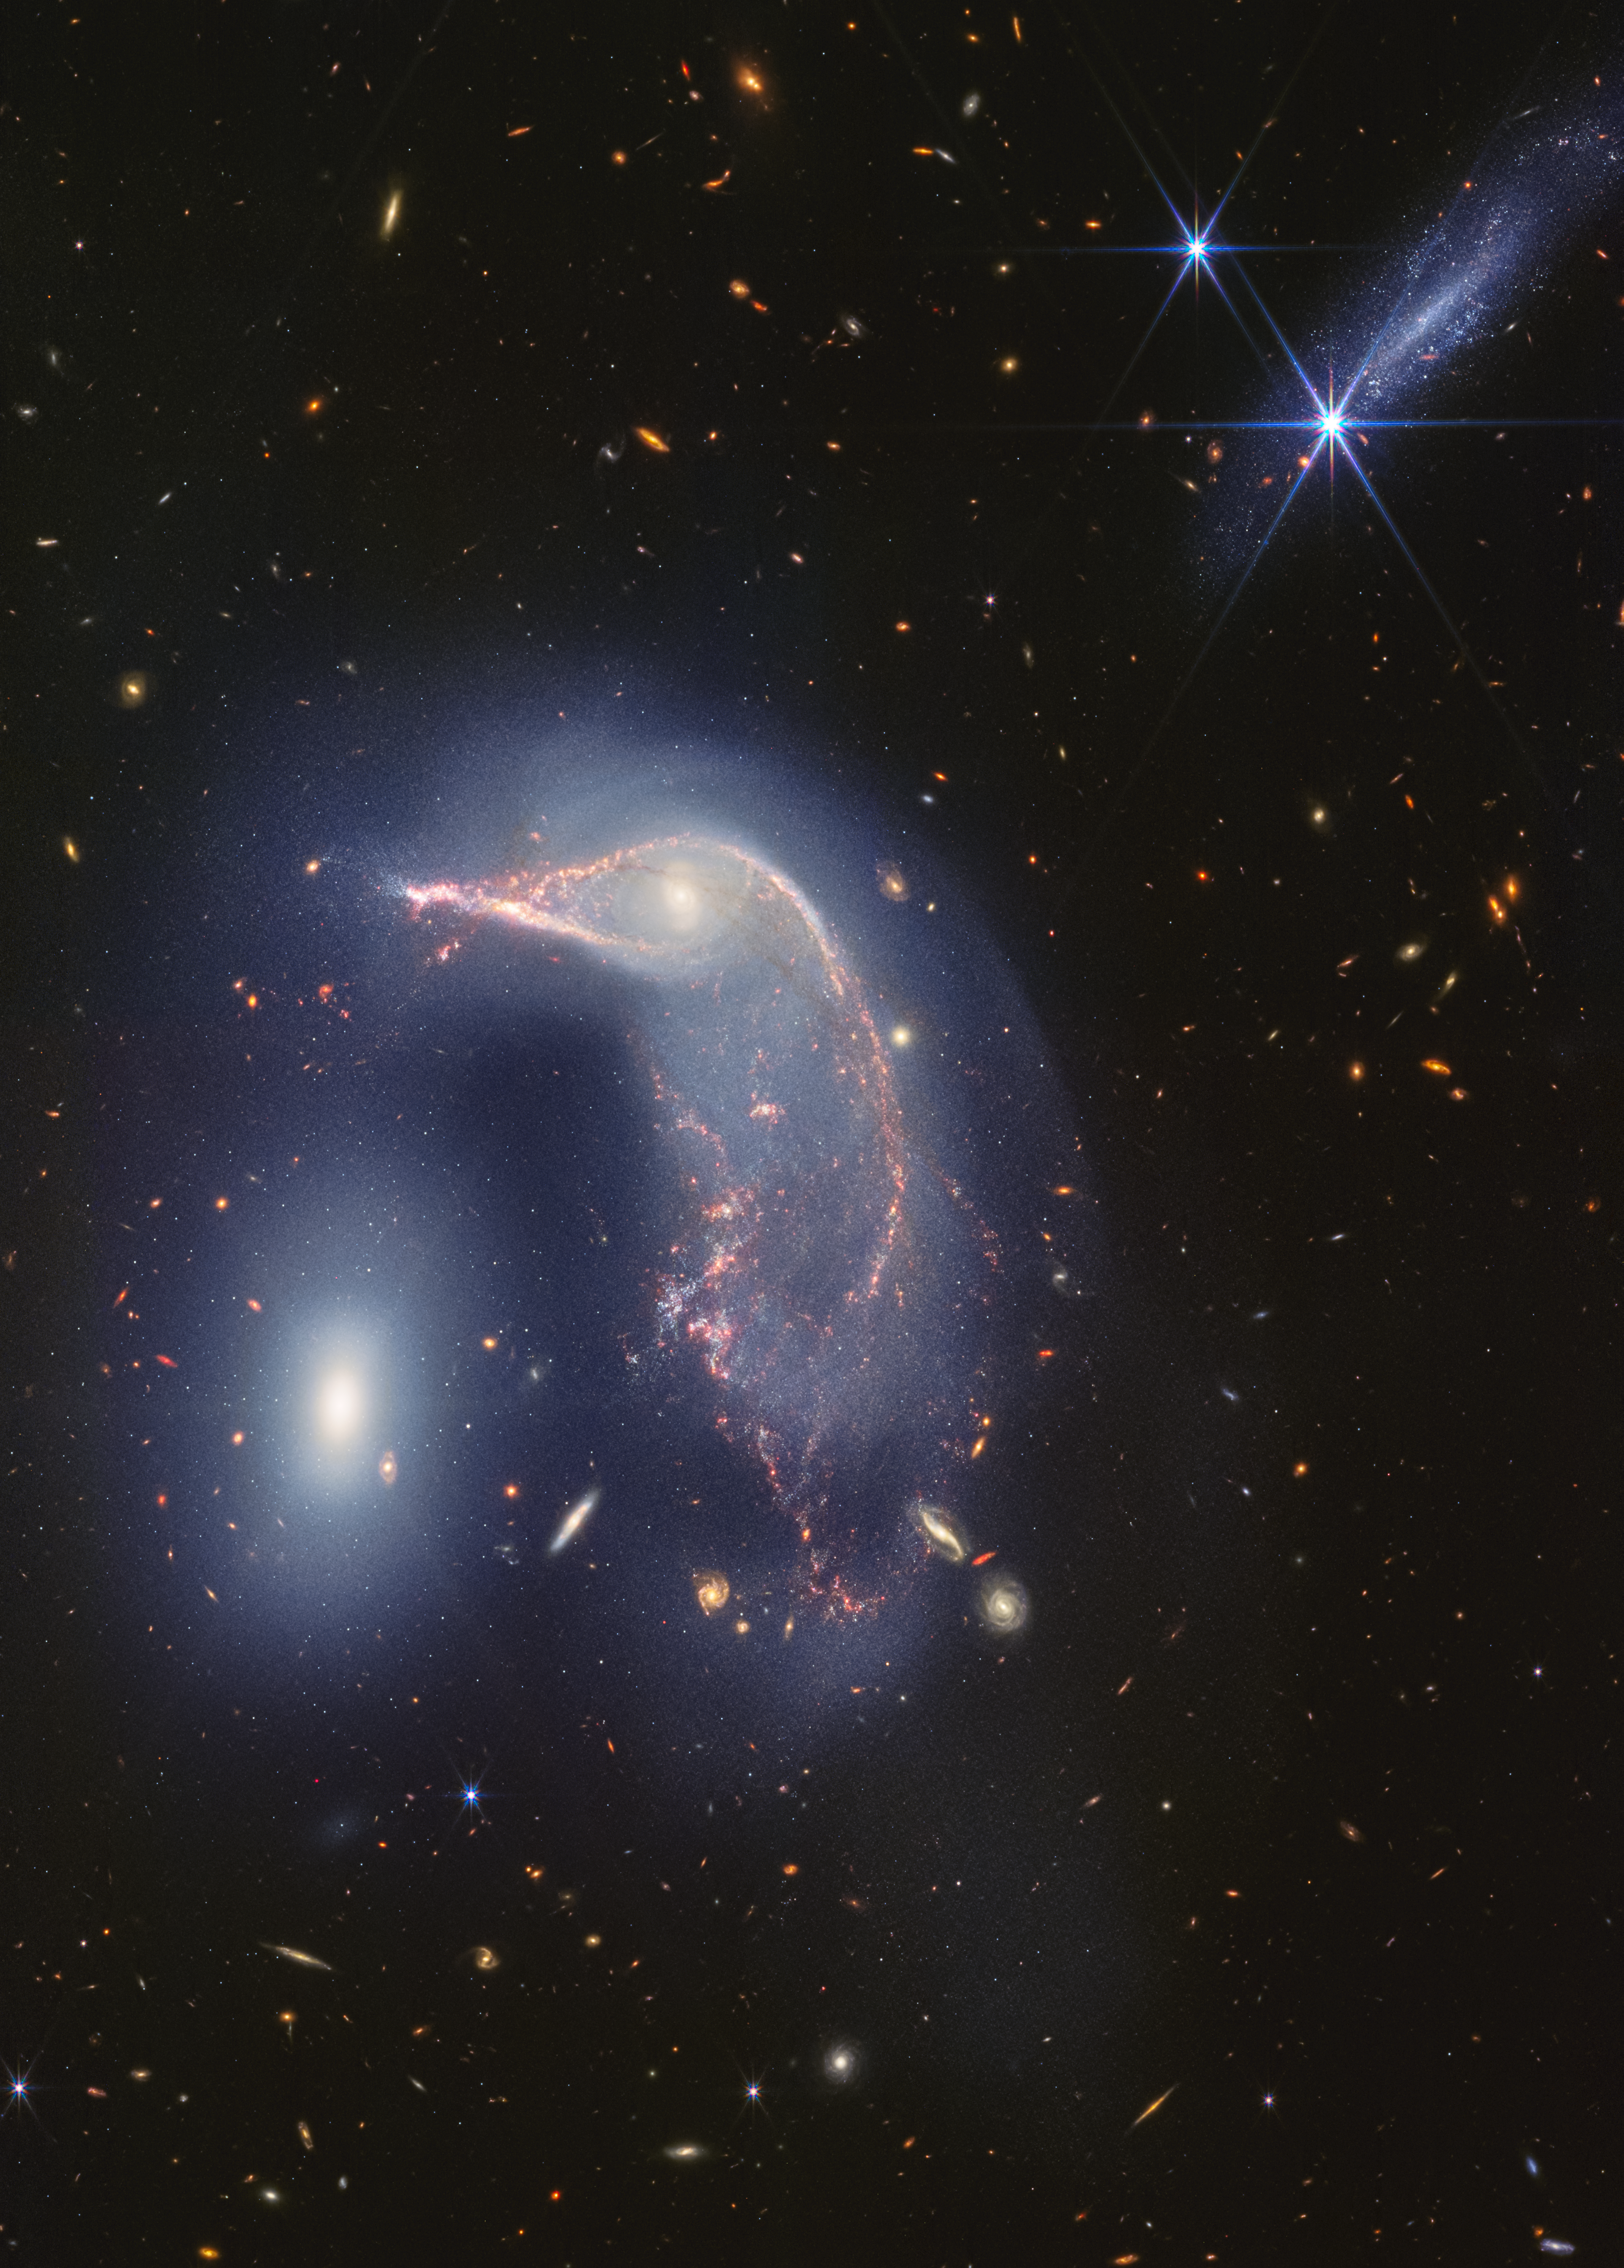

Interacting galaxies Arp 142 (NIRCam image)

The distorted spiral galaxy at the centre, the Penguin, and the compact elliptical galaxy at the left, the Egg, are locked in an active embrace. A new near- and mid-infrared image from the James Webb Space Telescope, taken to mark its second year of science, shows that their interaction is marked by a faint upside-down U-shaped blue glow.

The pair, known jointly as Arp 142, made their first pass between 25 and 75 million years ago — causing ‘fireworks’, or new star formation, in the Penguin. In the most extreme cases, mergers can cause galaxies to form thousands of new stars per year for a few million years. For the Penguin, research has shown that about 100 to 200 stars have formed per year. By comparison, our Milky Way galaxy (which is not interacting with a galaxy of the same size) forms roughly six to seven new stars per year.

This gravitational shimmy also remade the Penguin’s appearance. Its coiled spiral arms unwound, and gas and dust were pulled in an array of directions, like it was releasing confetti. It is rare for individual stars to collide when galaxies interact (space is vast), but the galaxies’ mingling disrupts their stars’ orbits.

Today, the Penguin’s galactic centre looks like an eye set within a head, and the galaxy has prominent star trails that take the shape of a beak, backbone, and fanned-out tail. A faint, but prominent dust lane extends from its beak down to its tail.

Despite the Penguin appearing far larger than the Egg, these galaxies have approximately the same mass. This is one reason why the smaller-looking Egg hasn’t yet merged with the Penguin. (If one was less massive, it may have merged earlier.)

The oval Egg is filled with old stars, and little gas and dust, which is why it isn’t sending out ‘streamers’ or tidal tails of its own and instead has maintained a compact oval shape. If you look closely, the Egg has four prominent diffraction spikes — the galaxy’s stars are so concentrated that it gleams.

Now, find the bright, edge-on galaxy at top right. It may look like a party crasher, but it’s not nearby. Cataloged PGC 1237172, it lies 100 million light-years closer to Earth. It is relatively young and isn’t overflowing with dust, which is why it practically disappears in Webb’s mid-infrared view.

The background of this image is overflowing with far more distant galaxies. This is a testament to the sensitivity and resolution of Webb’s infrared cameras.

Arp 142 lies 326 million light-years from Earth in the constellation Hydra.

Credit: NASA, ESA, CSA, STScI